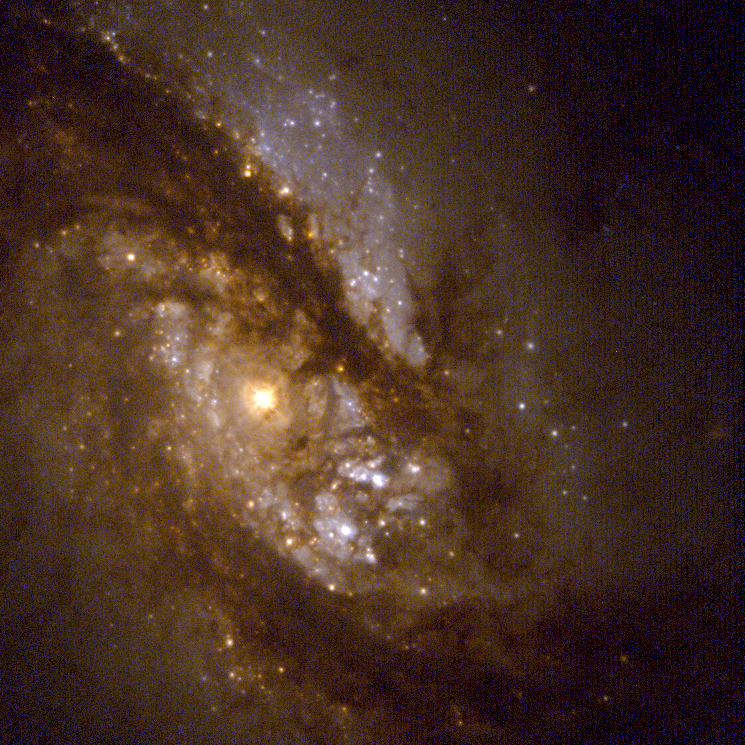

Starry bulges yield secrets to galaxy growth (Hubble WFPC2 view)

This visible-light picture is a close-up view of the galaxy's hub. The bright yellow orb is the nucleus. The dark material surrounding the orb is gas and dust that is being funneled into the central region by the bar. The blue regions pinpoint young star clusters.

Credit: NASA/ESA and John Trauger (Jet Propulsion Laboratory)